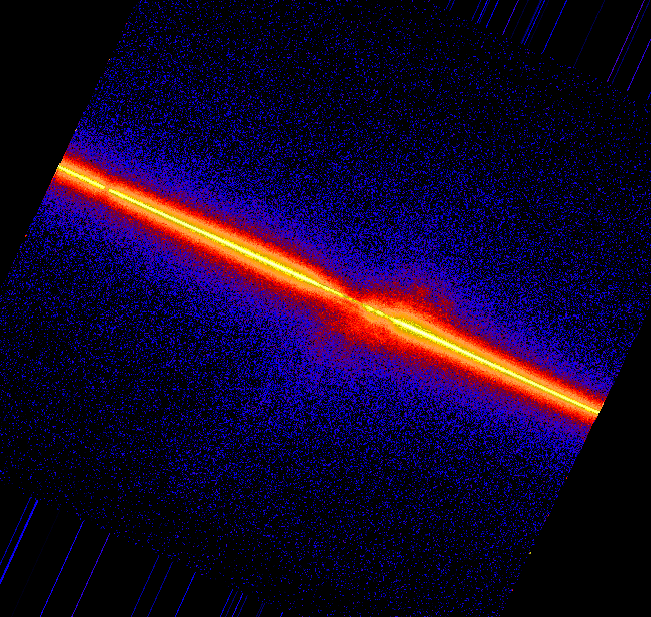

Fireworks near galaxy NGC 4151 (STIS ultraviolet)

This STIS spectral image shows the velocity distribution of the carbon emission from the gas in the core of NGC 4151. It requires more energy to make the carbon gas glow (CIV at 1549 Angstroms) than it does to ionize the oxygen gas seen in the other images. This means we expect that the carbon emitting gas is closer to the heart of the energy source.

Credit: John Hutchings (Dominion Astrophysical Observatory), Bruce Woodgate (GSFC/NASA/ESA), Mary Beth Kaiser (Johns Hopkins University), Steven Kraemer(Catholic University of America), and the STIS Team